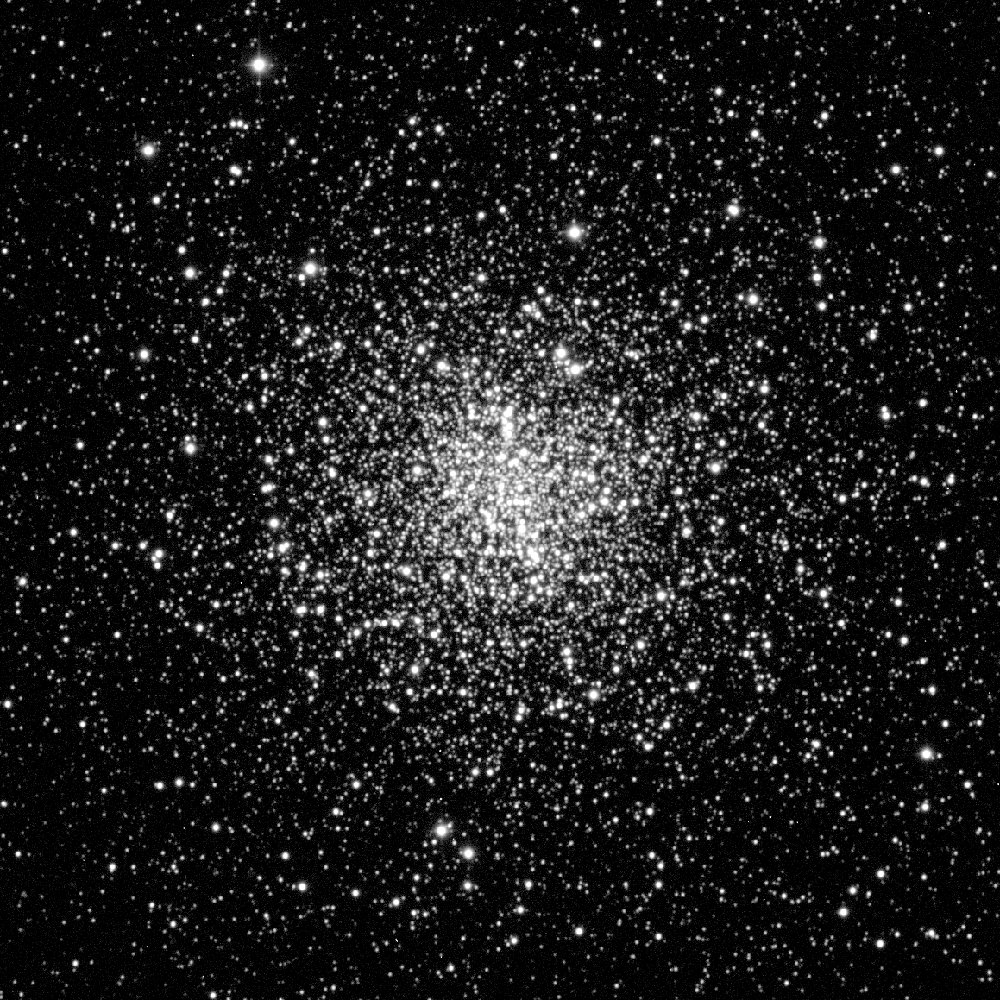

White Dwarf Stars in M4

A view of globular cluster M4 (fourth object in the Messier catalog of star clusters and nebulae). The nearest globular cluster to Earth (7, 000 light-years away), and containing more than 100, 000 stars, M4 was the target of a Hubble Space Telescope search for white dwarf stars.

Credit: Kitt Peak National Observatory 0.9-meter telescope, National Optical Astronomy Observatories; courtesy M. Bolte (Universityof California, Santa Cruz)